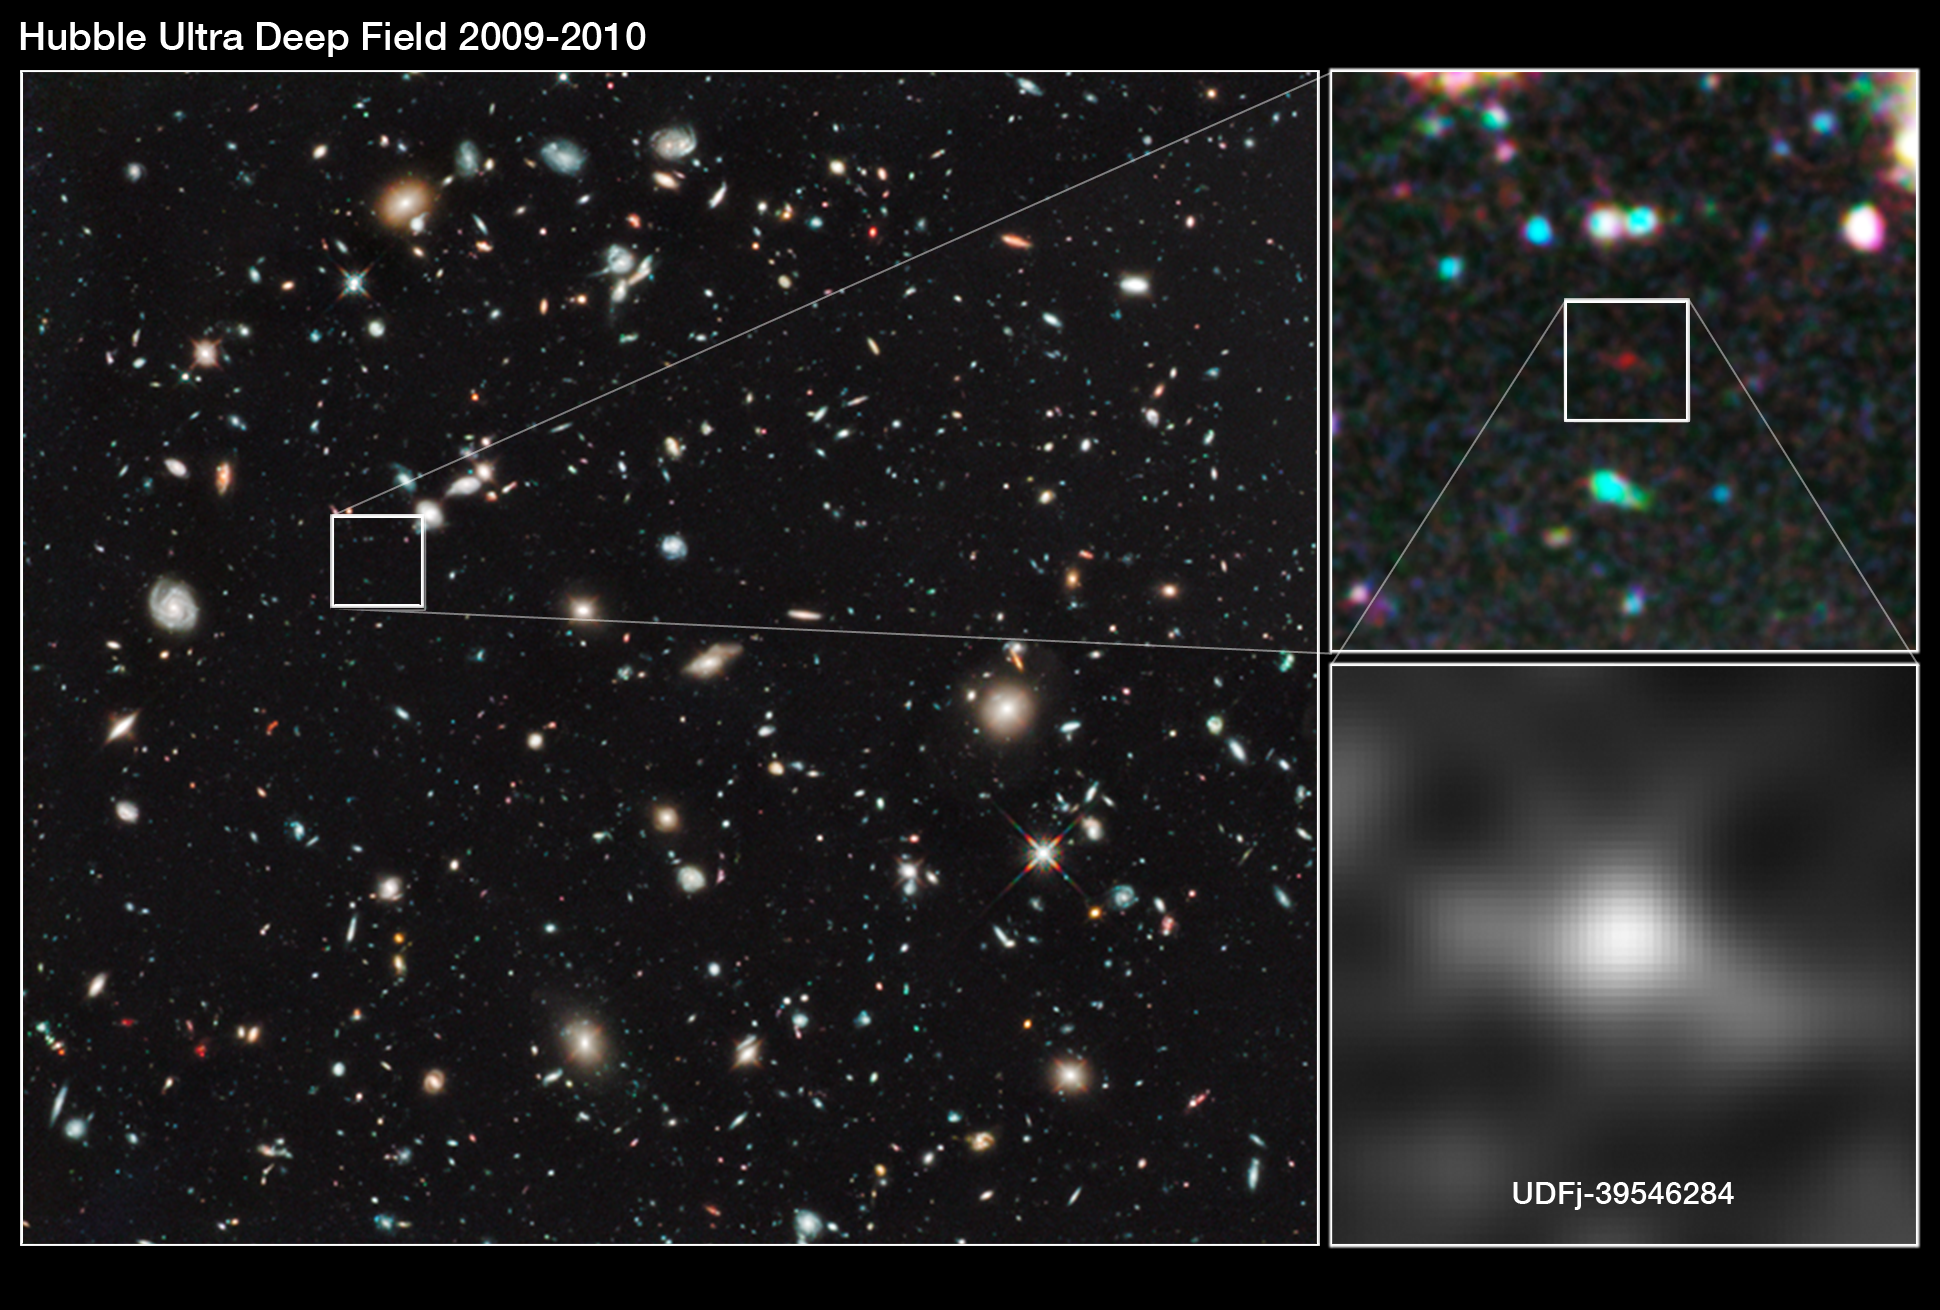

Hubble finds a new contender for galaxy distance record

Astronomers have used Hubble to spot what they think is the furthest and one of the very earliest galaxies ever seen in the Universe. Candidate galaxy UDFj-39546284 appears as a faint red blob in this ultra deep field exposure taken with the NASA/ESA Hubble Space Telescope. This is the deepest infrared image taken of the Universe. Based on the object’s colour, astronomers believe that its light has taken 13.2 billion years to reach us. Spectroscopic confirmation that this is indeed the most distant galaxy ever seen is expected to come from the NASA/ESA/CSA James Webb Space Telescope, which is planned for launch later this decade.

Credit: NASA, ESA, G. Illingworth (University of California, Santa Cruz), R. Bouwens (University of California, Santa Cruz, and Leiden University) and the HUDF09 Team